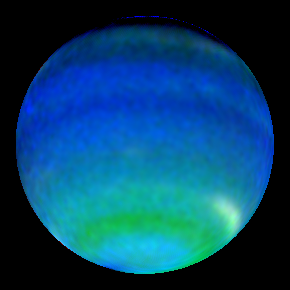

Neptune in Primary Colours

The predominant blue colour of the planet is a result of the absorption of red and infrared light by Neptune's methane atmosphere.

Credit: Lawrence Sromovsky (University of Wisconsin-Madison), NASA/ESA